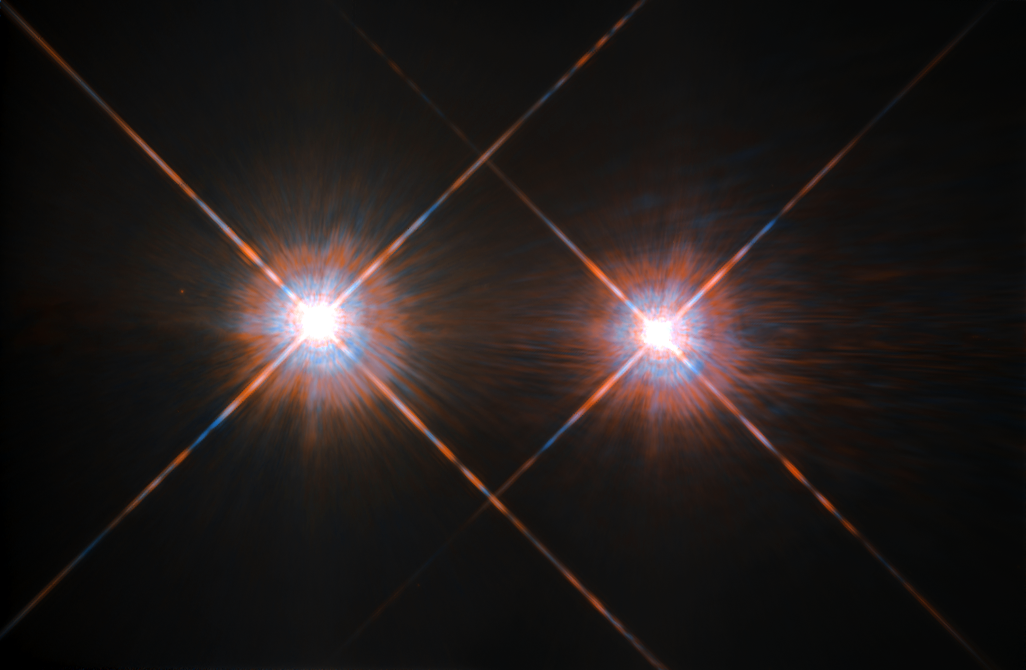

Best image of Alpha Centauri A and B

The closest star system to the Earth is the famous Alpha Centauri group. Located in the constellation of Centaurus (The Centaur), at a distance of 4.3 light-years, this system is made up of the binary formed by the stars Alpha Centauri A and Alpha Centauri B, plus the faint red dwarf Alpha Centauri C, also known as Proxima Centauri.

The NASA/ESA Hubble Space Telescope has given us this stunning view of the bright Alpha Centauri A (on the left) and Alpha Centauri B (on the right), flashing like huge cosmic headlamps in the dark. The image was captured by the Wide Field and Planetary Camera 2 (WFPC2). WFPC2 was Hubble’s most used instrument for the first 13 years of the space telescope’s life, being replaced in 2009 by WFC3 during Servicing Mission 4. This portrait of Alpha Centauri was produced by observations carried out at optical and near-infrared wavelengths.

Compared to the Sun, Alpha Centauri A is of the same stellar type G2, and slightly bigger, while Alpha Centauri B, a K1-type star, is slightly smaller. They orbit a common centre of gravity once every 80 years, with a minimum distance of about 11 times the distance between the Earth and the Sun. Because these two stars are, together with their sibling Proxima Centauri, the closest to Earth, they are among the best studied by astronomers. And they are also among the prime targets in the hunt for habitable exoplanets. Using the HARPS instrument astronomers already discovered a planet orbiting Alpha Centauri B. 24 August 2016 astronomers announced the discovery of an Earth-like planet in the habitable zone orbiting the star Proxima Centauri.

Credit: ESA/Hubble & NASA